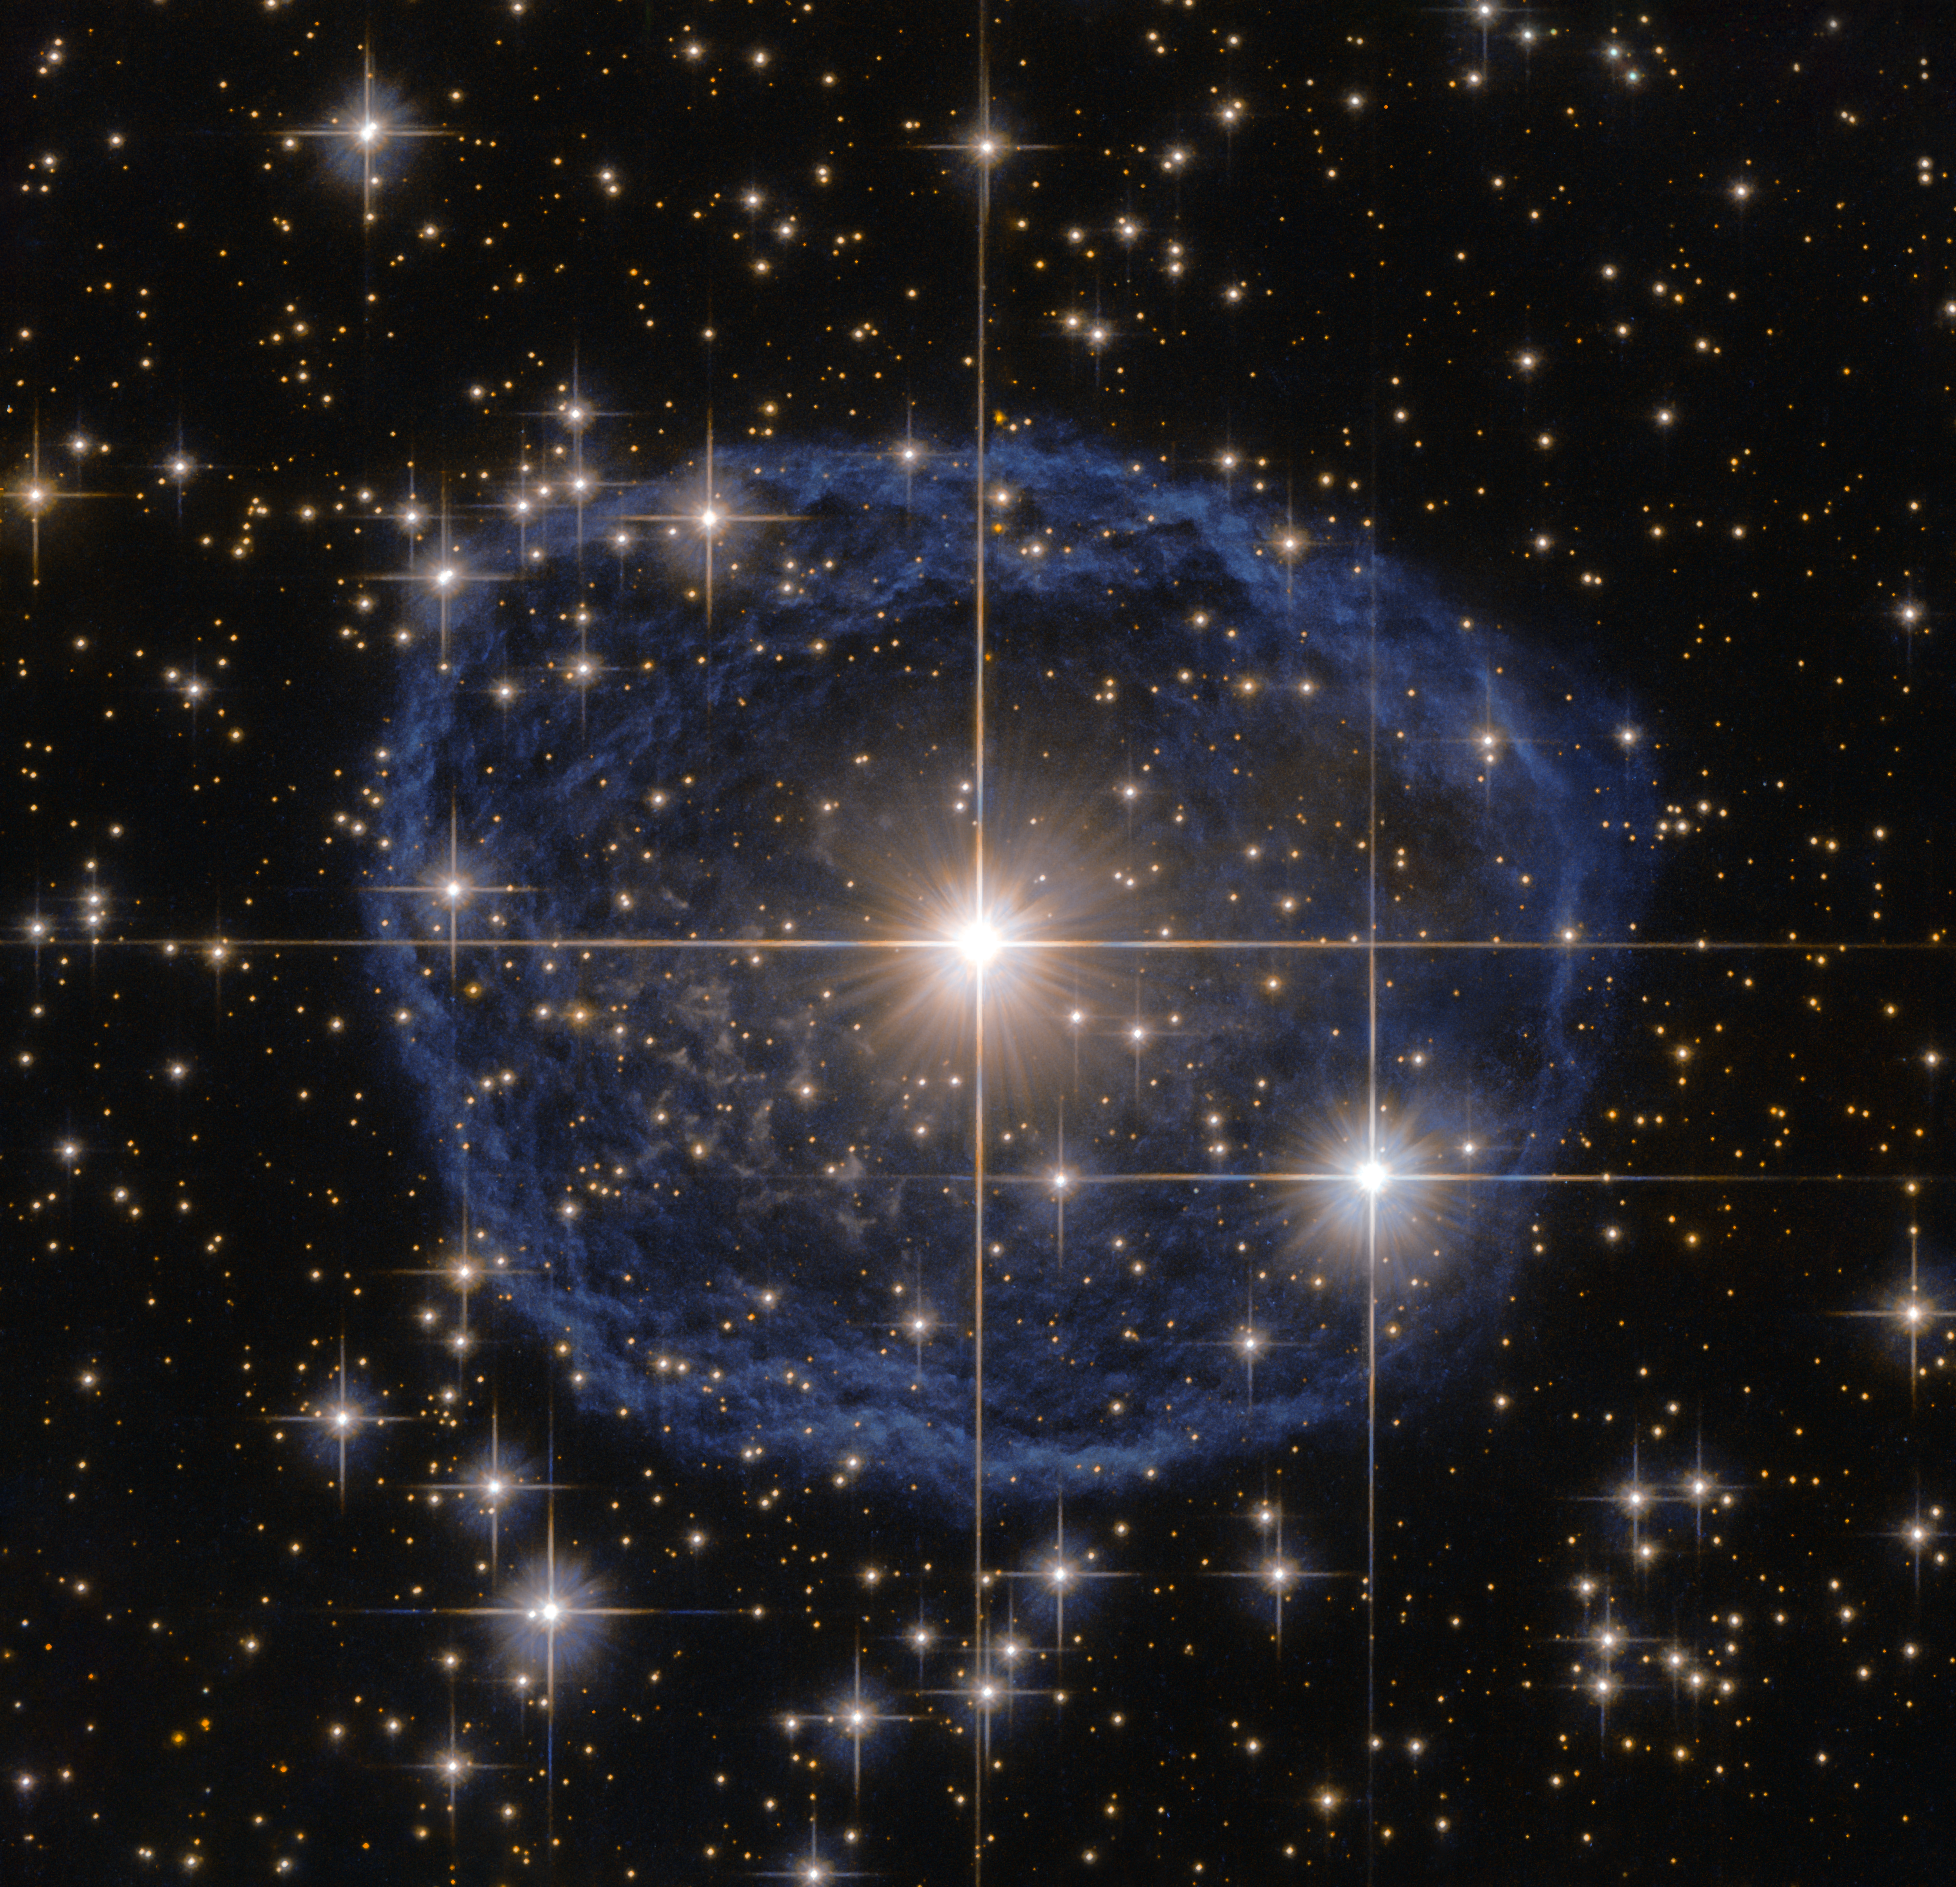

Blue bubble in Carina

Sparkling at the centre of this beautiful NASA/ESA Hubble Space Telescope image is a Wolf–Rayet star known as WR 31a, located about 30 000 light-years away in the constellation of Carina (The Keel).

The distinctive blue bubble appearing to encircle WR 31a, and its uncatalogued stellar sidekick, is a Wolf–Rayet nebula — an interstellar cloud of dust, hydrogen, helium and other gases. Created when speedy stellar winds interact with the outer layers of hydrogen ejected by Wolf–Rayet stars, these nebulae are frequently ring-shaped or spherical. The bubble — estimated to have formed around 20 000 years ago — is expanding at a rate of around 220 000 kilometres per hour!

Unfortunately, the lifecycle of a Wolf–Rayet star is only a few hundred thousand years — the blink of an eye in cosmic terms. Despite beginning life with a mass at least 20 times that of the Sun, Wolf–Rayet stars typically lose half their mass in less than 100 000 years. And WR 31a is no exception to this case. It will, therefore, eventually end its life as a spectacular supernova, and the stellar material expelled from its explosion will later nourish a new generation of stars and planets.

Credit: ESA/Hubble & NASA Acknowledgement: Judy Schmidt